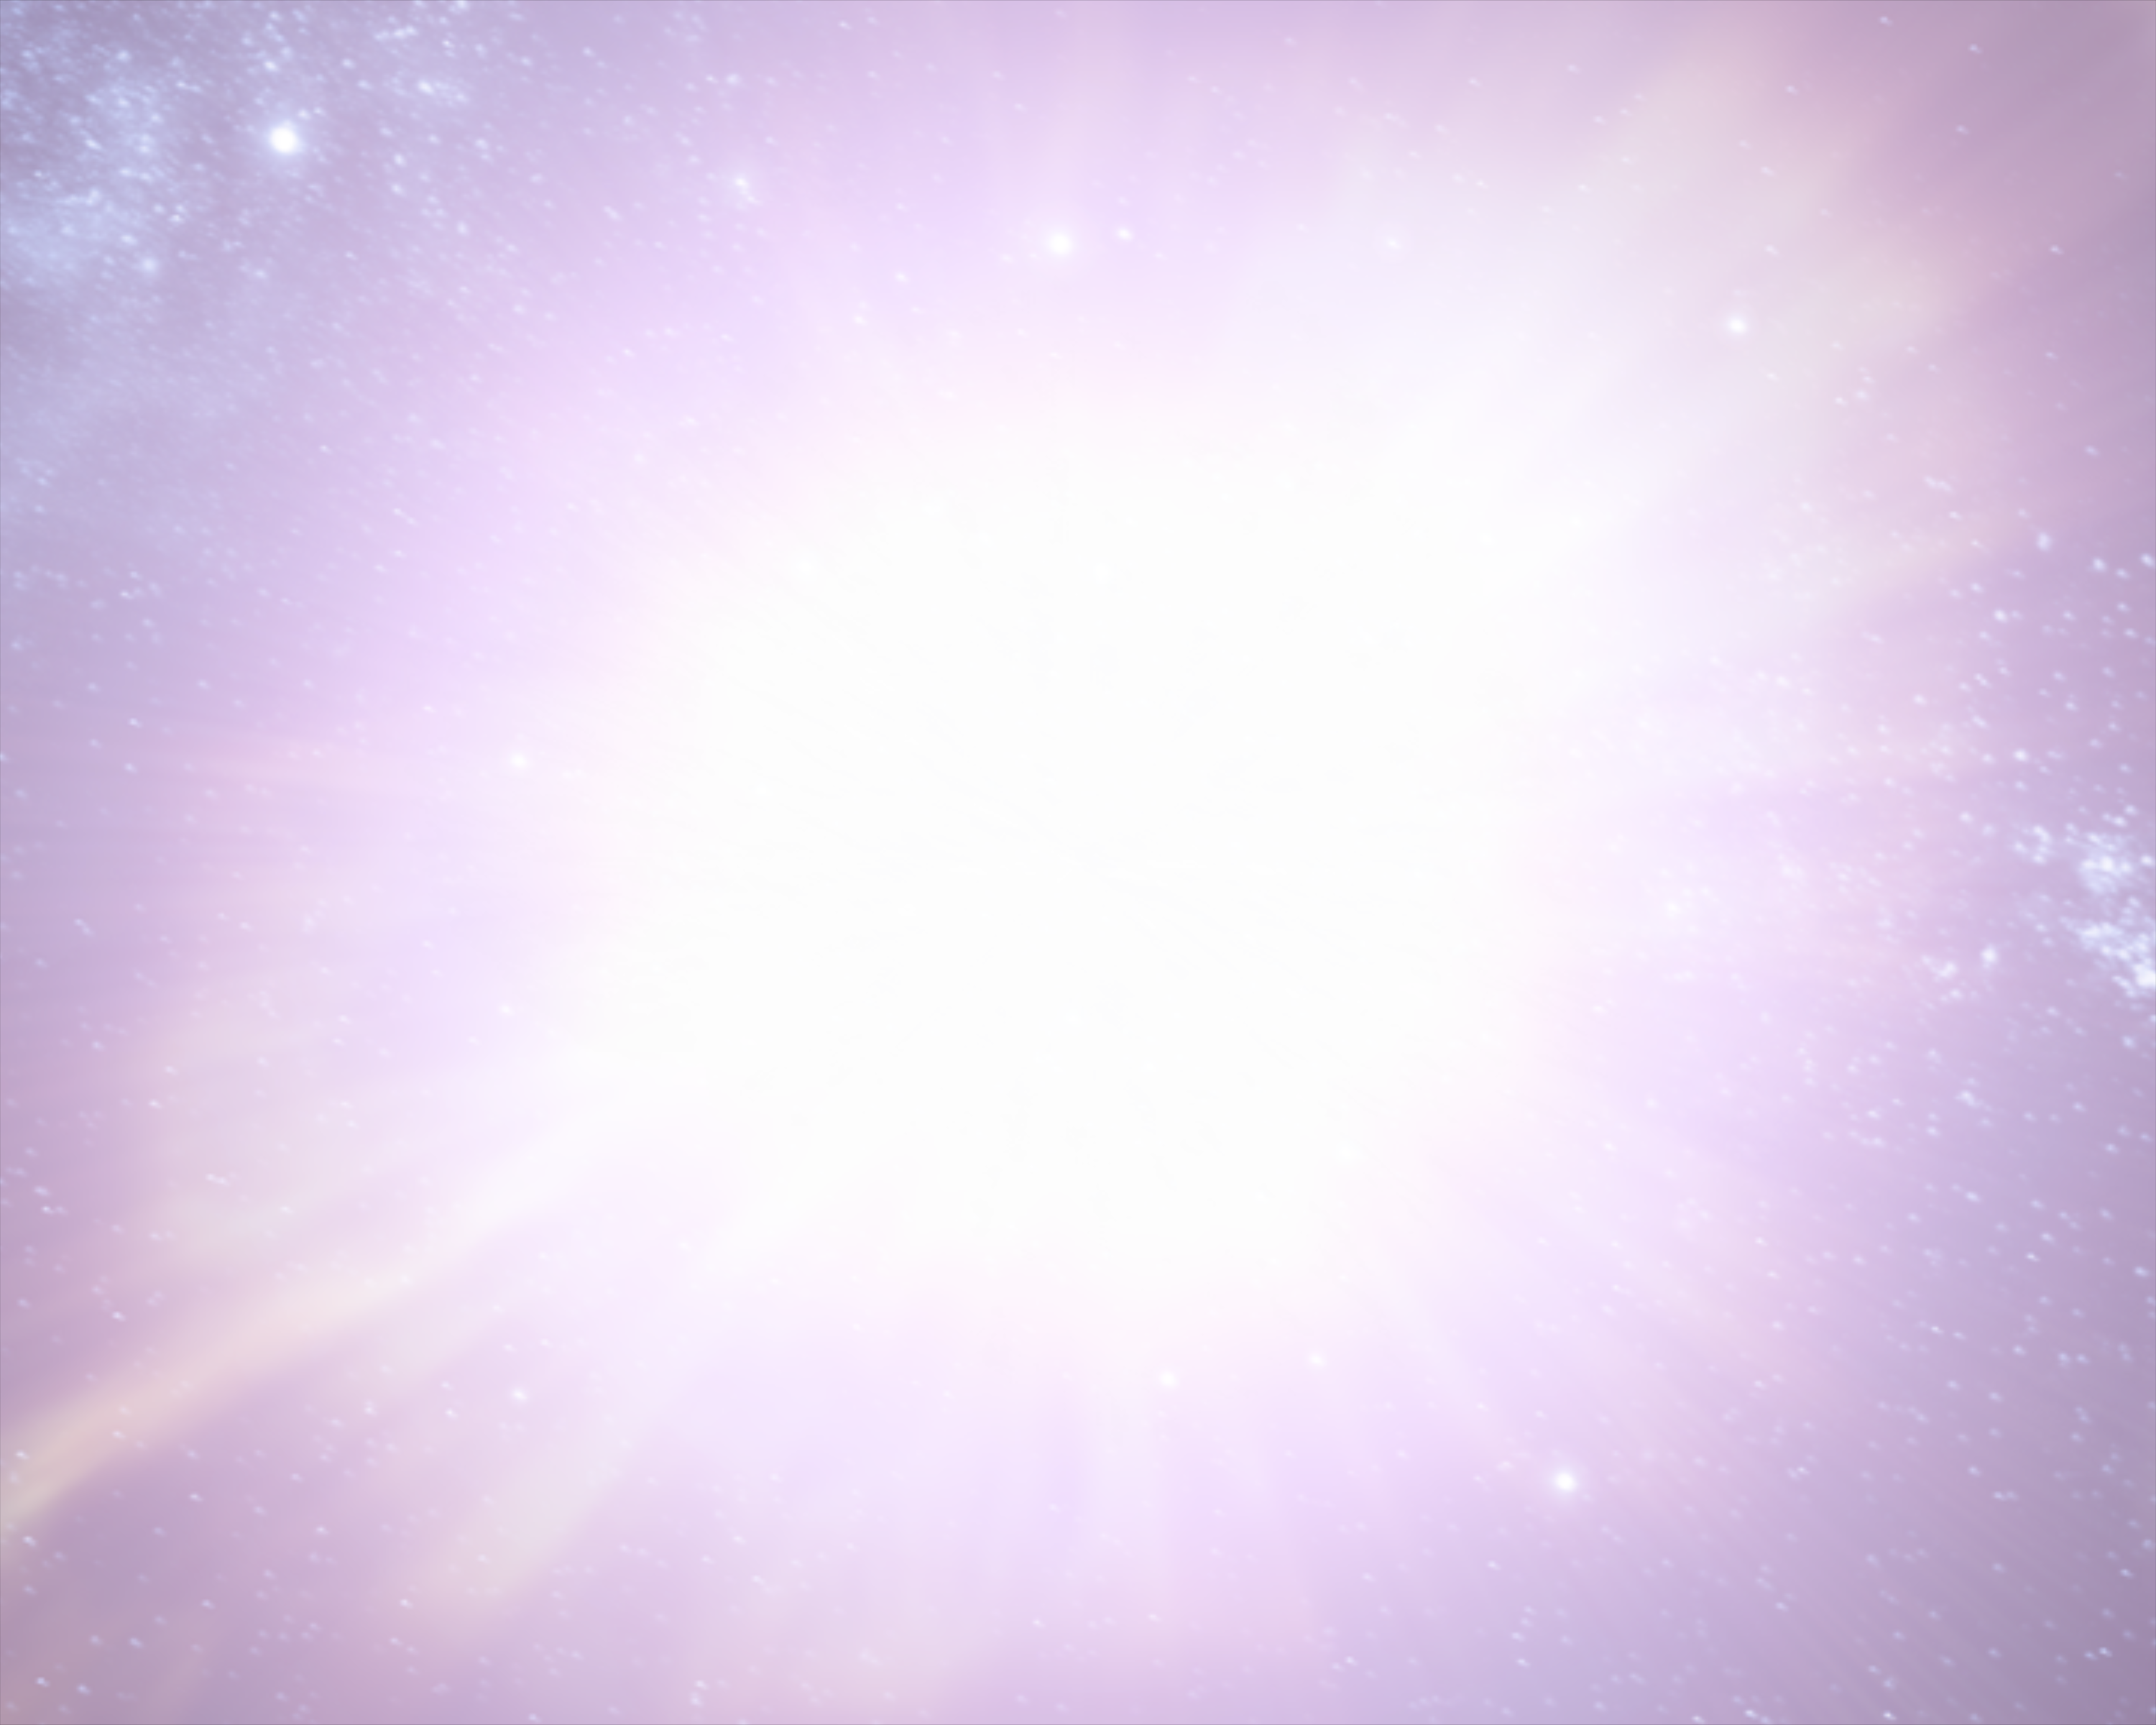

Animation still image 2 (artist's impression)

Still image from the animation of the 1054 supernova that created the Crab Nebula. Note: artist's impression.

Credit: ESA/Hubble